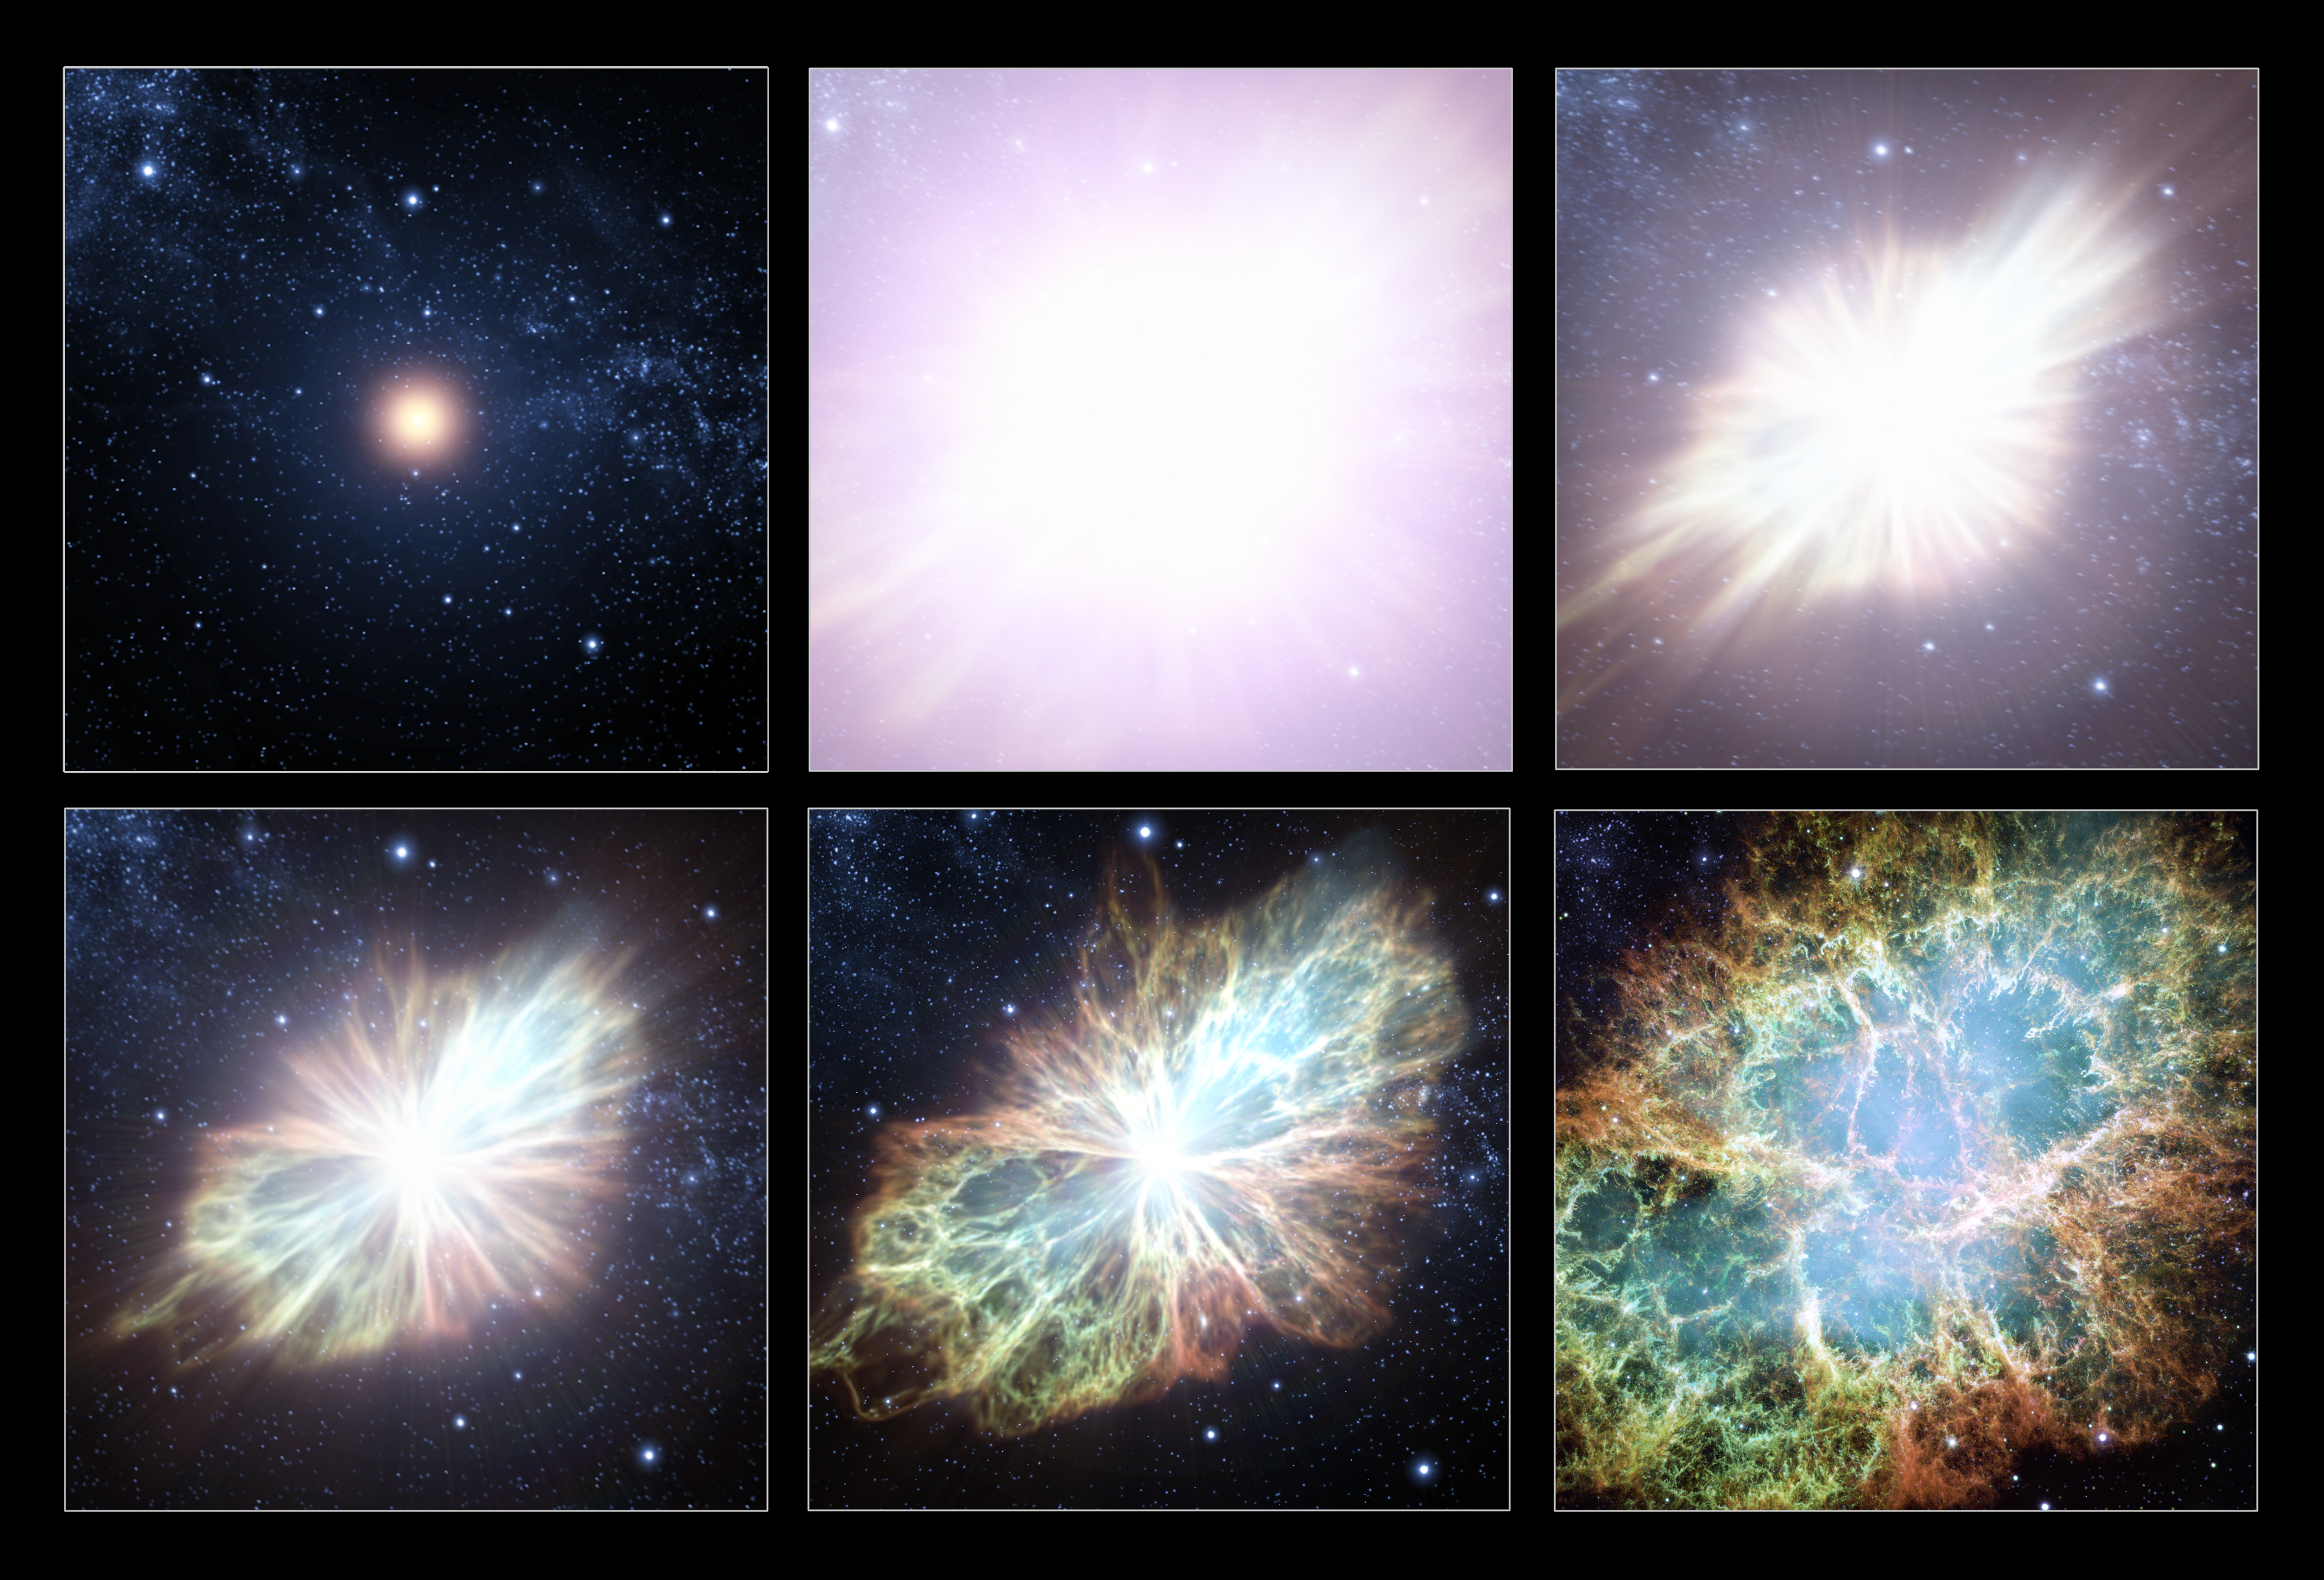

Animation still sequence

This sequence of animation stills shows an artist's impression's view of one of Nature's most violent processes - a supernova explosion. In 1054 Chinese astronomers observed a new and very bright star that continued to be visible for the next 2 years. A supernova is produced at the end of the life of a massive star when the nuclear processes in the interior of the star can no longer persist. The star collapses, triggering an extreme explosion releasing, at its peak, more energy than an entire galaxy. Shockwaves from supernova explosions can trigger the formation of new stars and solar systems such as our own.

This supernova explosion resulted in the formation of the Crab Nebula - one of Nature's finest laboratories, where studies of the effects of a supernova explosion can be undertaken.

Credit: ESA/Hubble